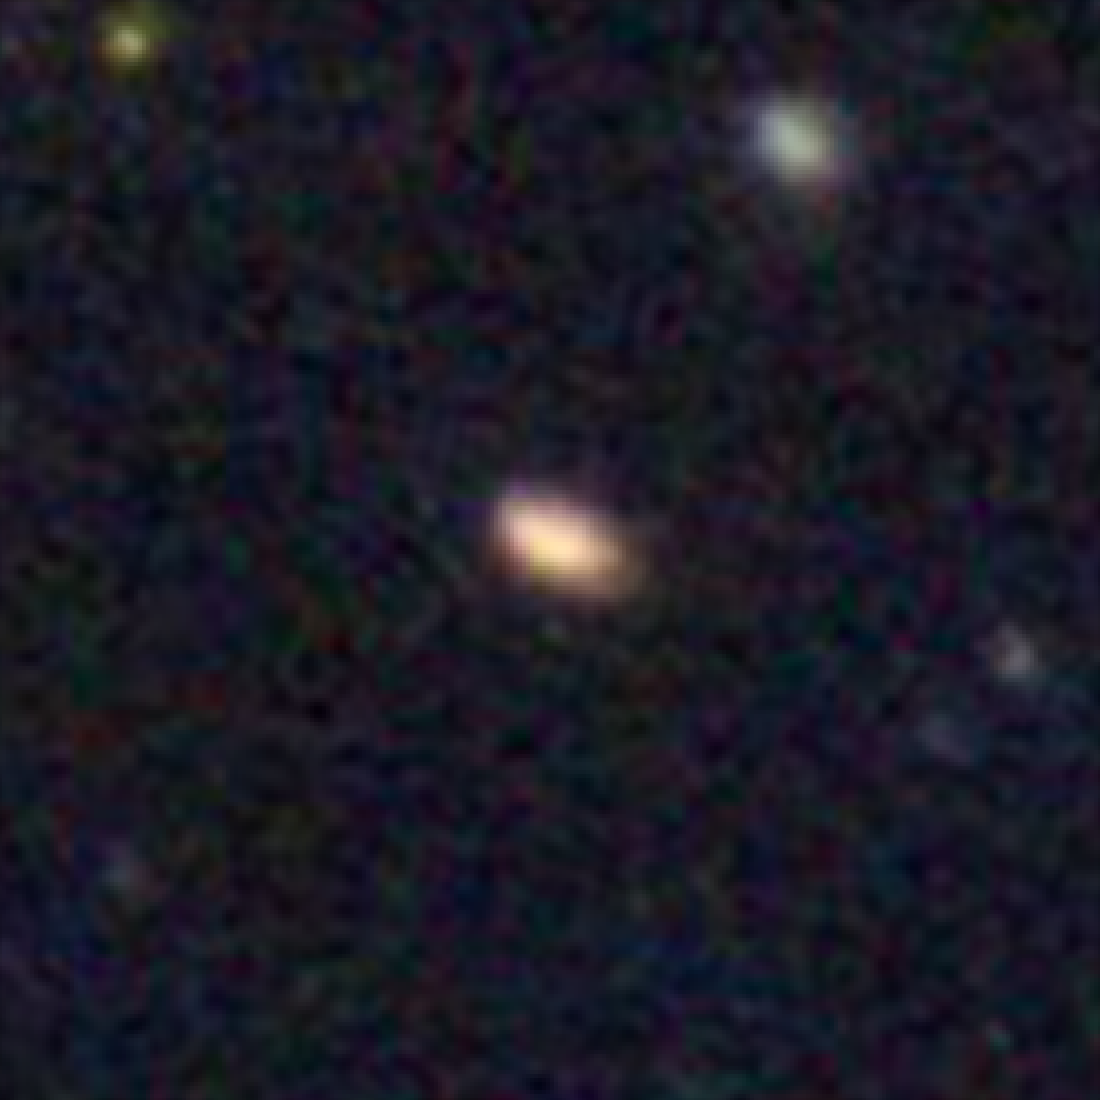

Hubble galaxy at redshift z = 2.4

This image, taken by the NASA/ESA Hubble Space Telescope, shows a galaxy similar in mass to the Milky Way. The galaxy is seen as it was 10.9 billion years ago.

Credit: NASA, ESA, C. Papovich (Texas A&M University), H. Ferguson (STScI), S. Faber (University of California, Santa Cruz), and I. Labbé (Leiden University)